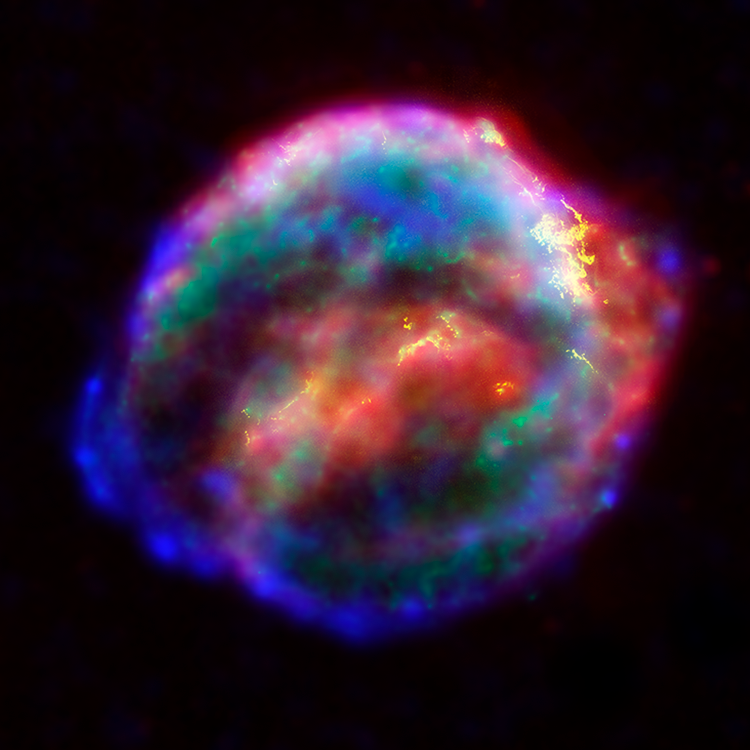

NASA's Great Observatories Provide a Detailed View of Kepler's Supernova Remnant

NASA's three Great Observatories - the Hubble Space Telescope, the Spitzer Space Telescope, and the Chandra X-ray Observatory - joined forces to probe the expanding remains of a supernova, called Kepler's supernova remnant, first seen 400 years ago by sky watchers, including famous astronomer Johannes Kepler.

The combined image unveils a bubble-shaped shroud of gas and dust that is 14 light-years wide and is expanding at 4 million miles per hour (2,000 kilometers per second). Observations from each telescope highlight distinct features of the supernova remnant, a fast-moving shell of iron-rich material from the exploded star, surrounded by an expanding shock wave that is sweeping up interstellar gas and dust.

Credit: NASA, ESA, R. Sankrit and W. Blair (Johns Hopkins University)